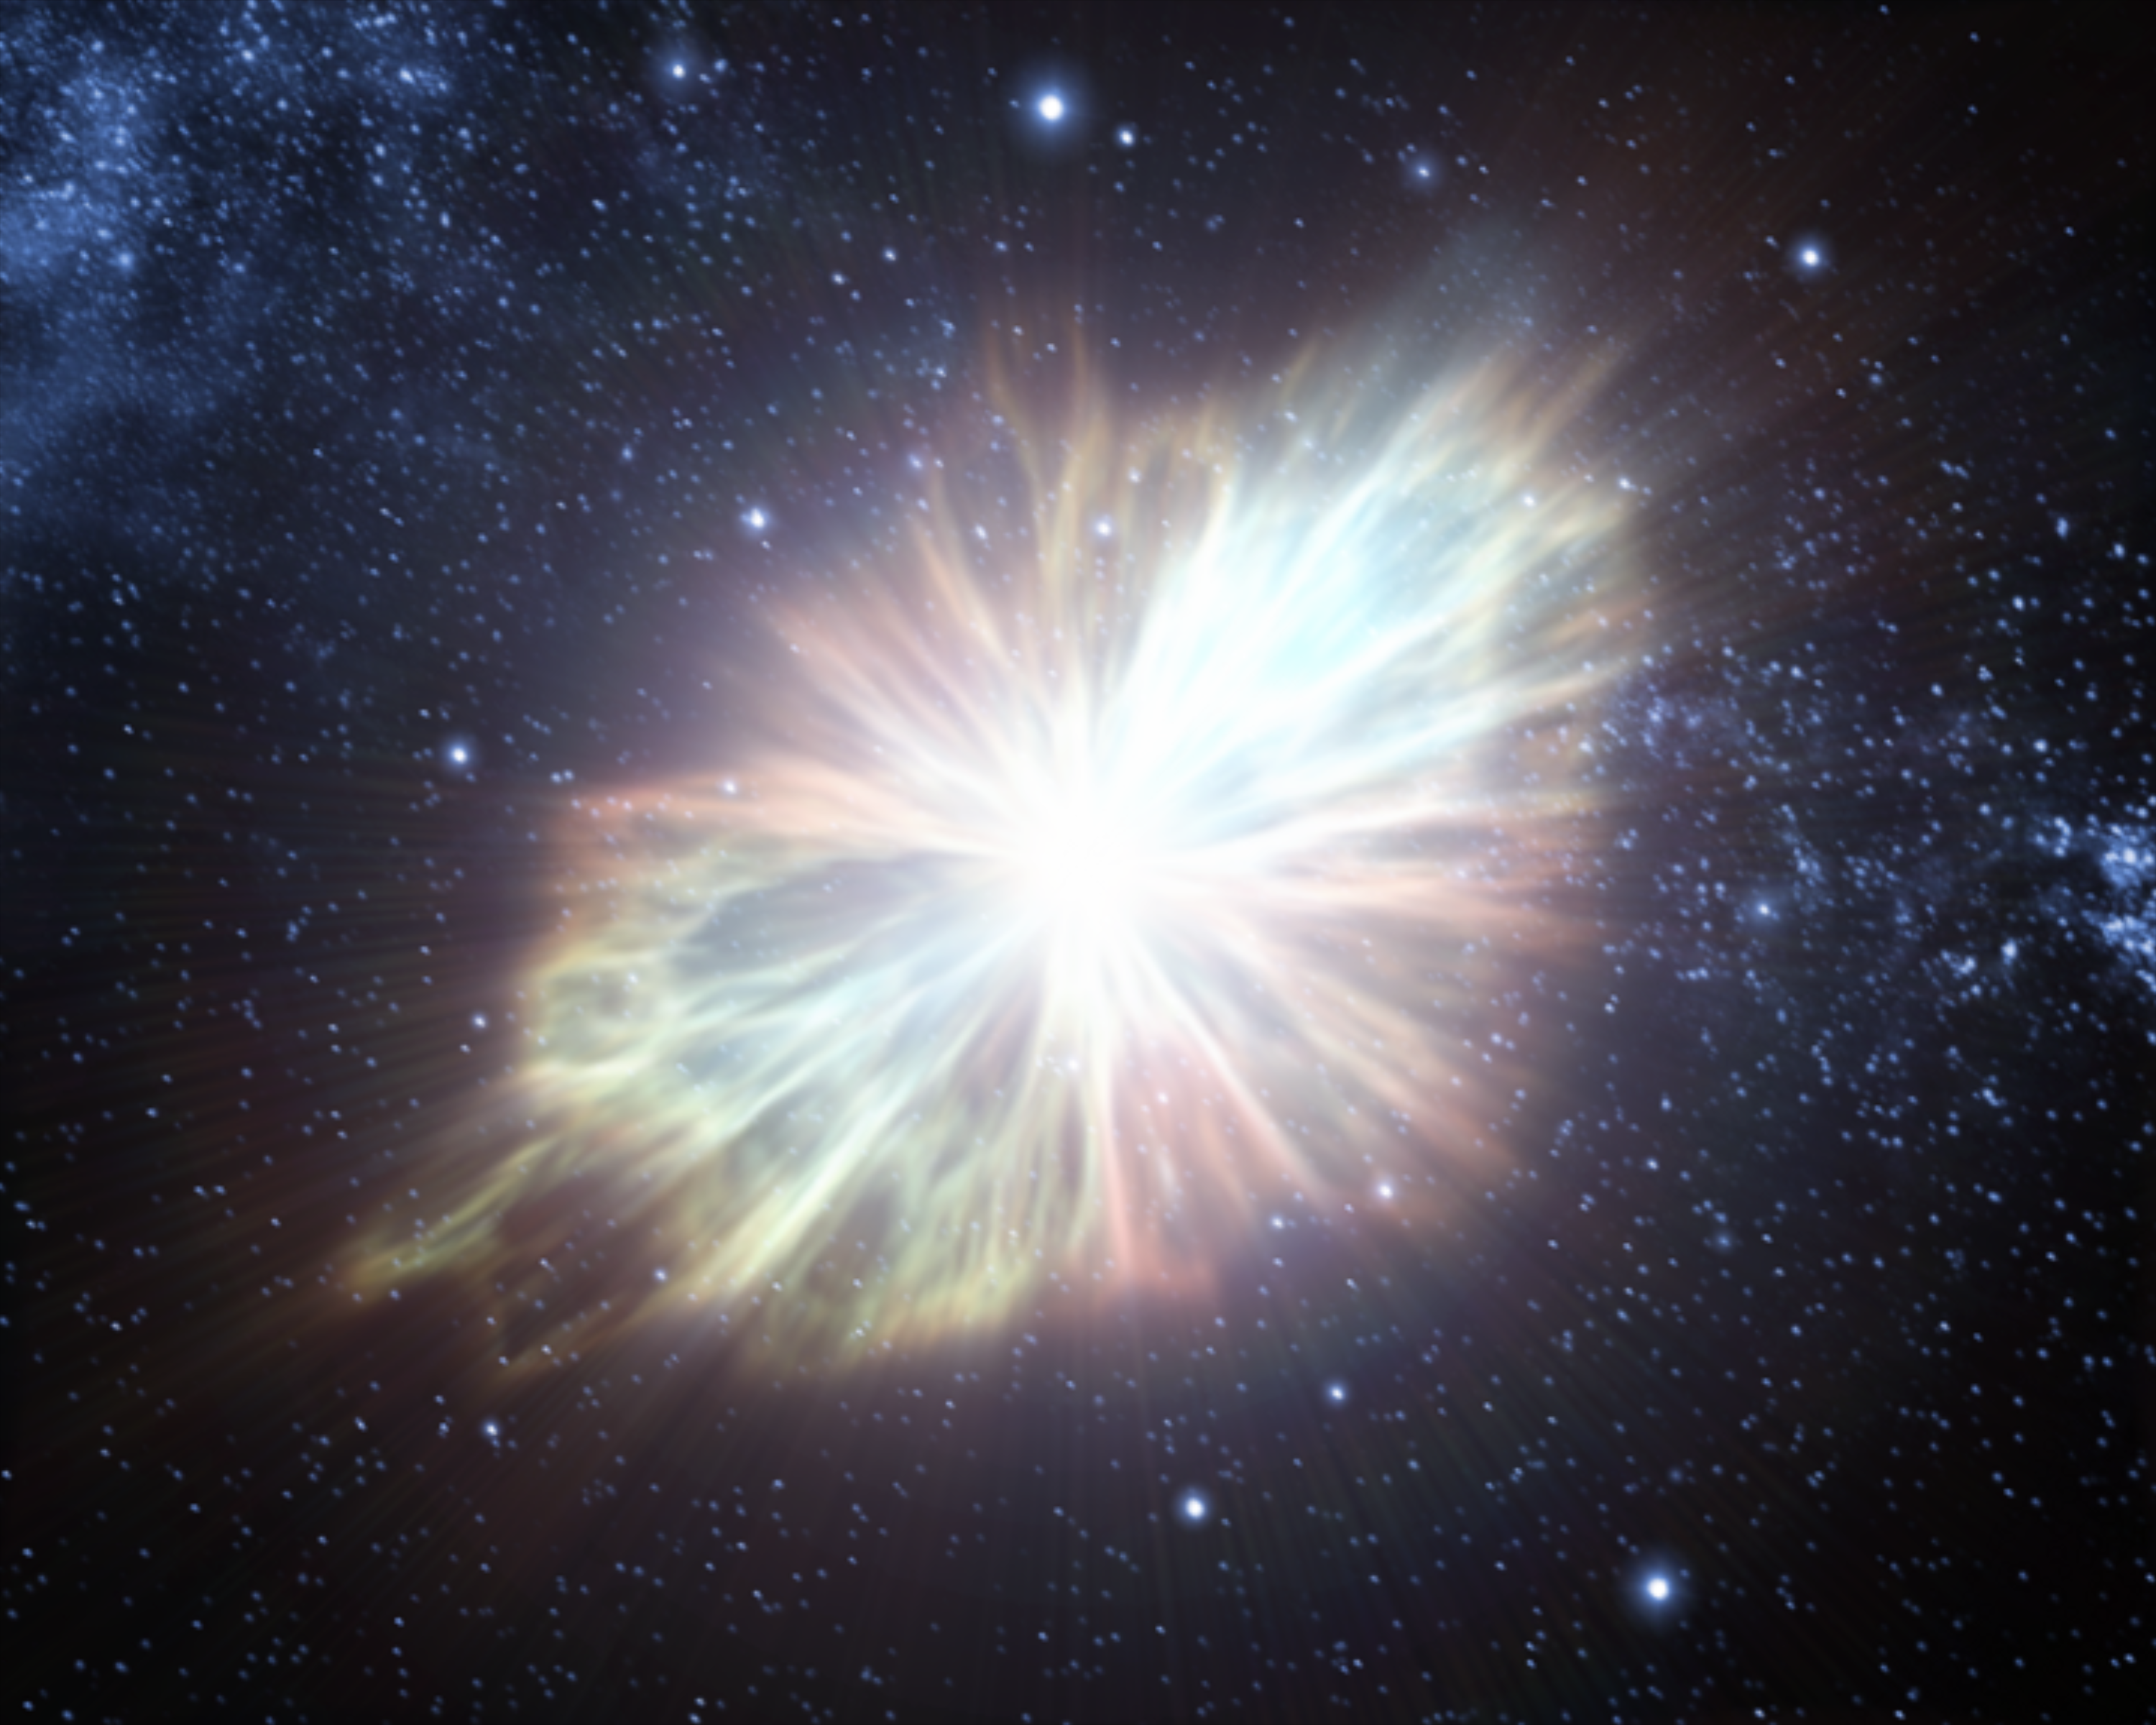

Animation still image 4 (artist's impression)

Still image from the animation of the 1054 supernova that created the Crab Nebula. Note: artist's impression.

Credit: ESA/Hubble